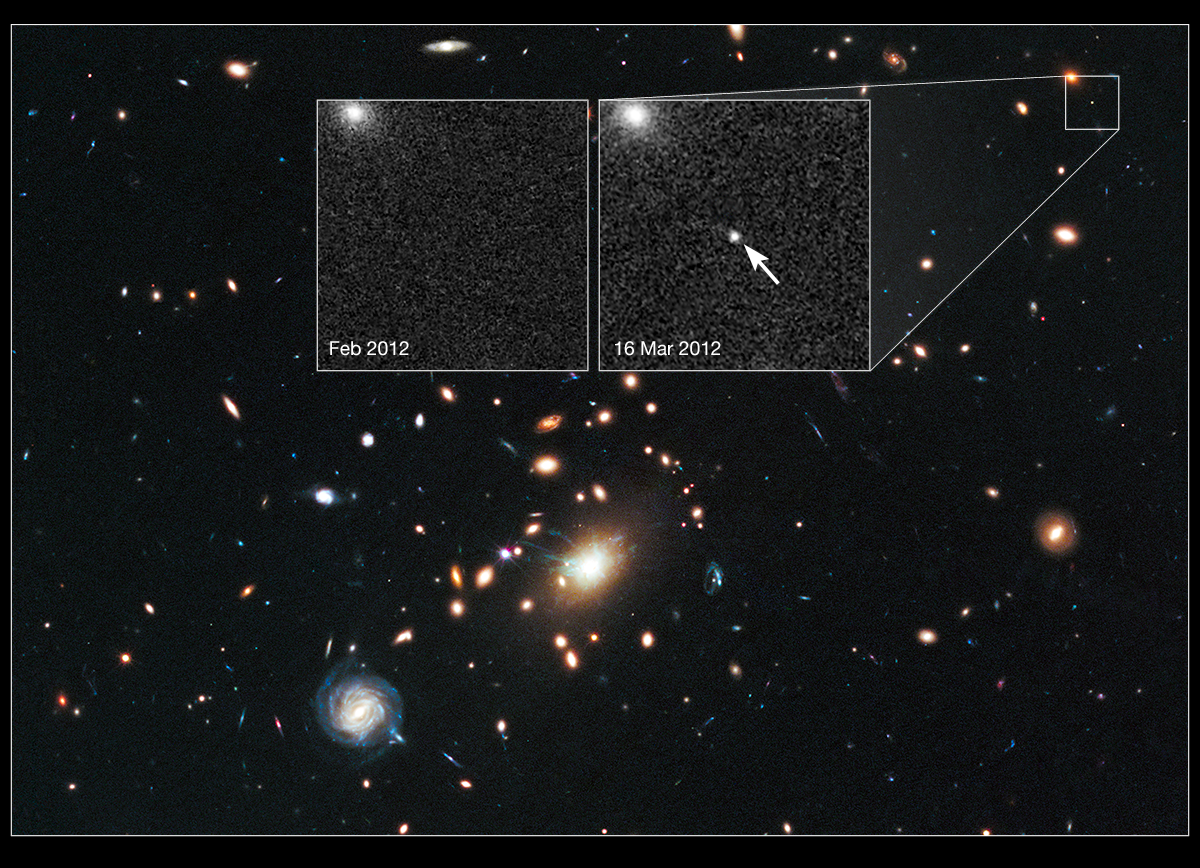

Cosmic lens RXJ1532.9+3021 helps Hubble to find a distant supernova (annotated)

The heart of a vast cluster of galaxies called RXJ1532.9+3021 is shown in this image, taken in visible and near-infrared light by the ESA/NASA Hubble Space Telescope.

The galaxy cluster is so massive that its gravity distorts, brightens, and magnifies light from more distant objects behind it, an effect called gravitational lensing. The small white box at upper right marks the location of an exploding star called a supernova, located far behind the cluster.

An enlarged view of the supernova, nicknamed Didius after the second century Roman emperor Didius Julianus, is shown in the inset image on the right, taken in March 2012. The supernova is the white dot in the center of the image. The bright blob at upper left is the core of the host galaxy. The supernova is seen as it appeared 7 billion years ago.

The inset image on the left, taken in February 2012, shows the same region before the supernova blast. The supernova is a member of a special group of exploding stars called Type Ia, prized by astronomers because they provide a consistent level of peak brightness that makes them reliable for making distance estimates.

Both inset images were taken in visible light with Hubble’s Advanced Camera for Surveys.

Finding a gravitationally lensed Type Ia supernova gives astronomers a unique opportunity to check the optical "prescription" of the foreground lensing cluster. The supernova is one of three exploding stars discovered in the Cluster Lensing And Supernova survey with Hubble (CLASH), and was followed up as part of a Supernova Cosmology Project HST program. CLASH is a Hubble census that probed the distribution of dark matter in 25 galaxy clusters. Dark matter cannot be seen directly but is believed to make up most of the universe's matter.

The image of the galaxy cluster was taken between February and April 2012 by Hubble's Wide Field Camera 3 and Advanced Camera for Surveys.

Credit: NASA, ESA, C. McCully (Rutgers University), A. Koekemoer (STScI), M. Postman (STScI), A. Riess (STScI/JHU), S. Perlmutter (UC Berkeley, LBNL), J. Nordin (NBNL, UC Berkeley), and D. Rubin (Florida State)